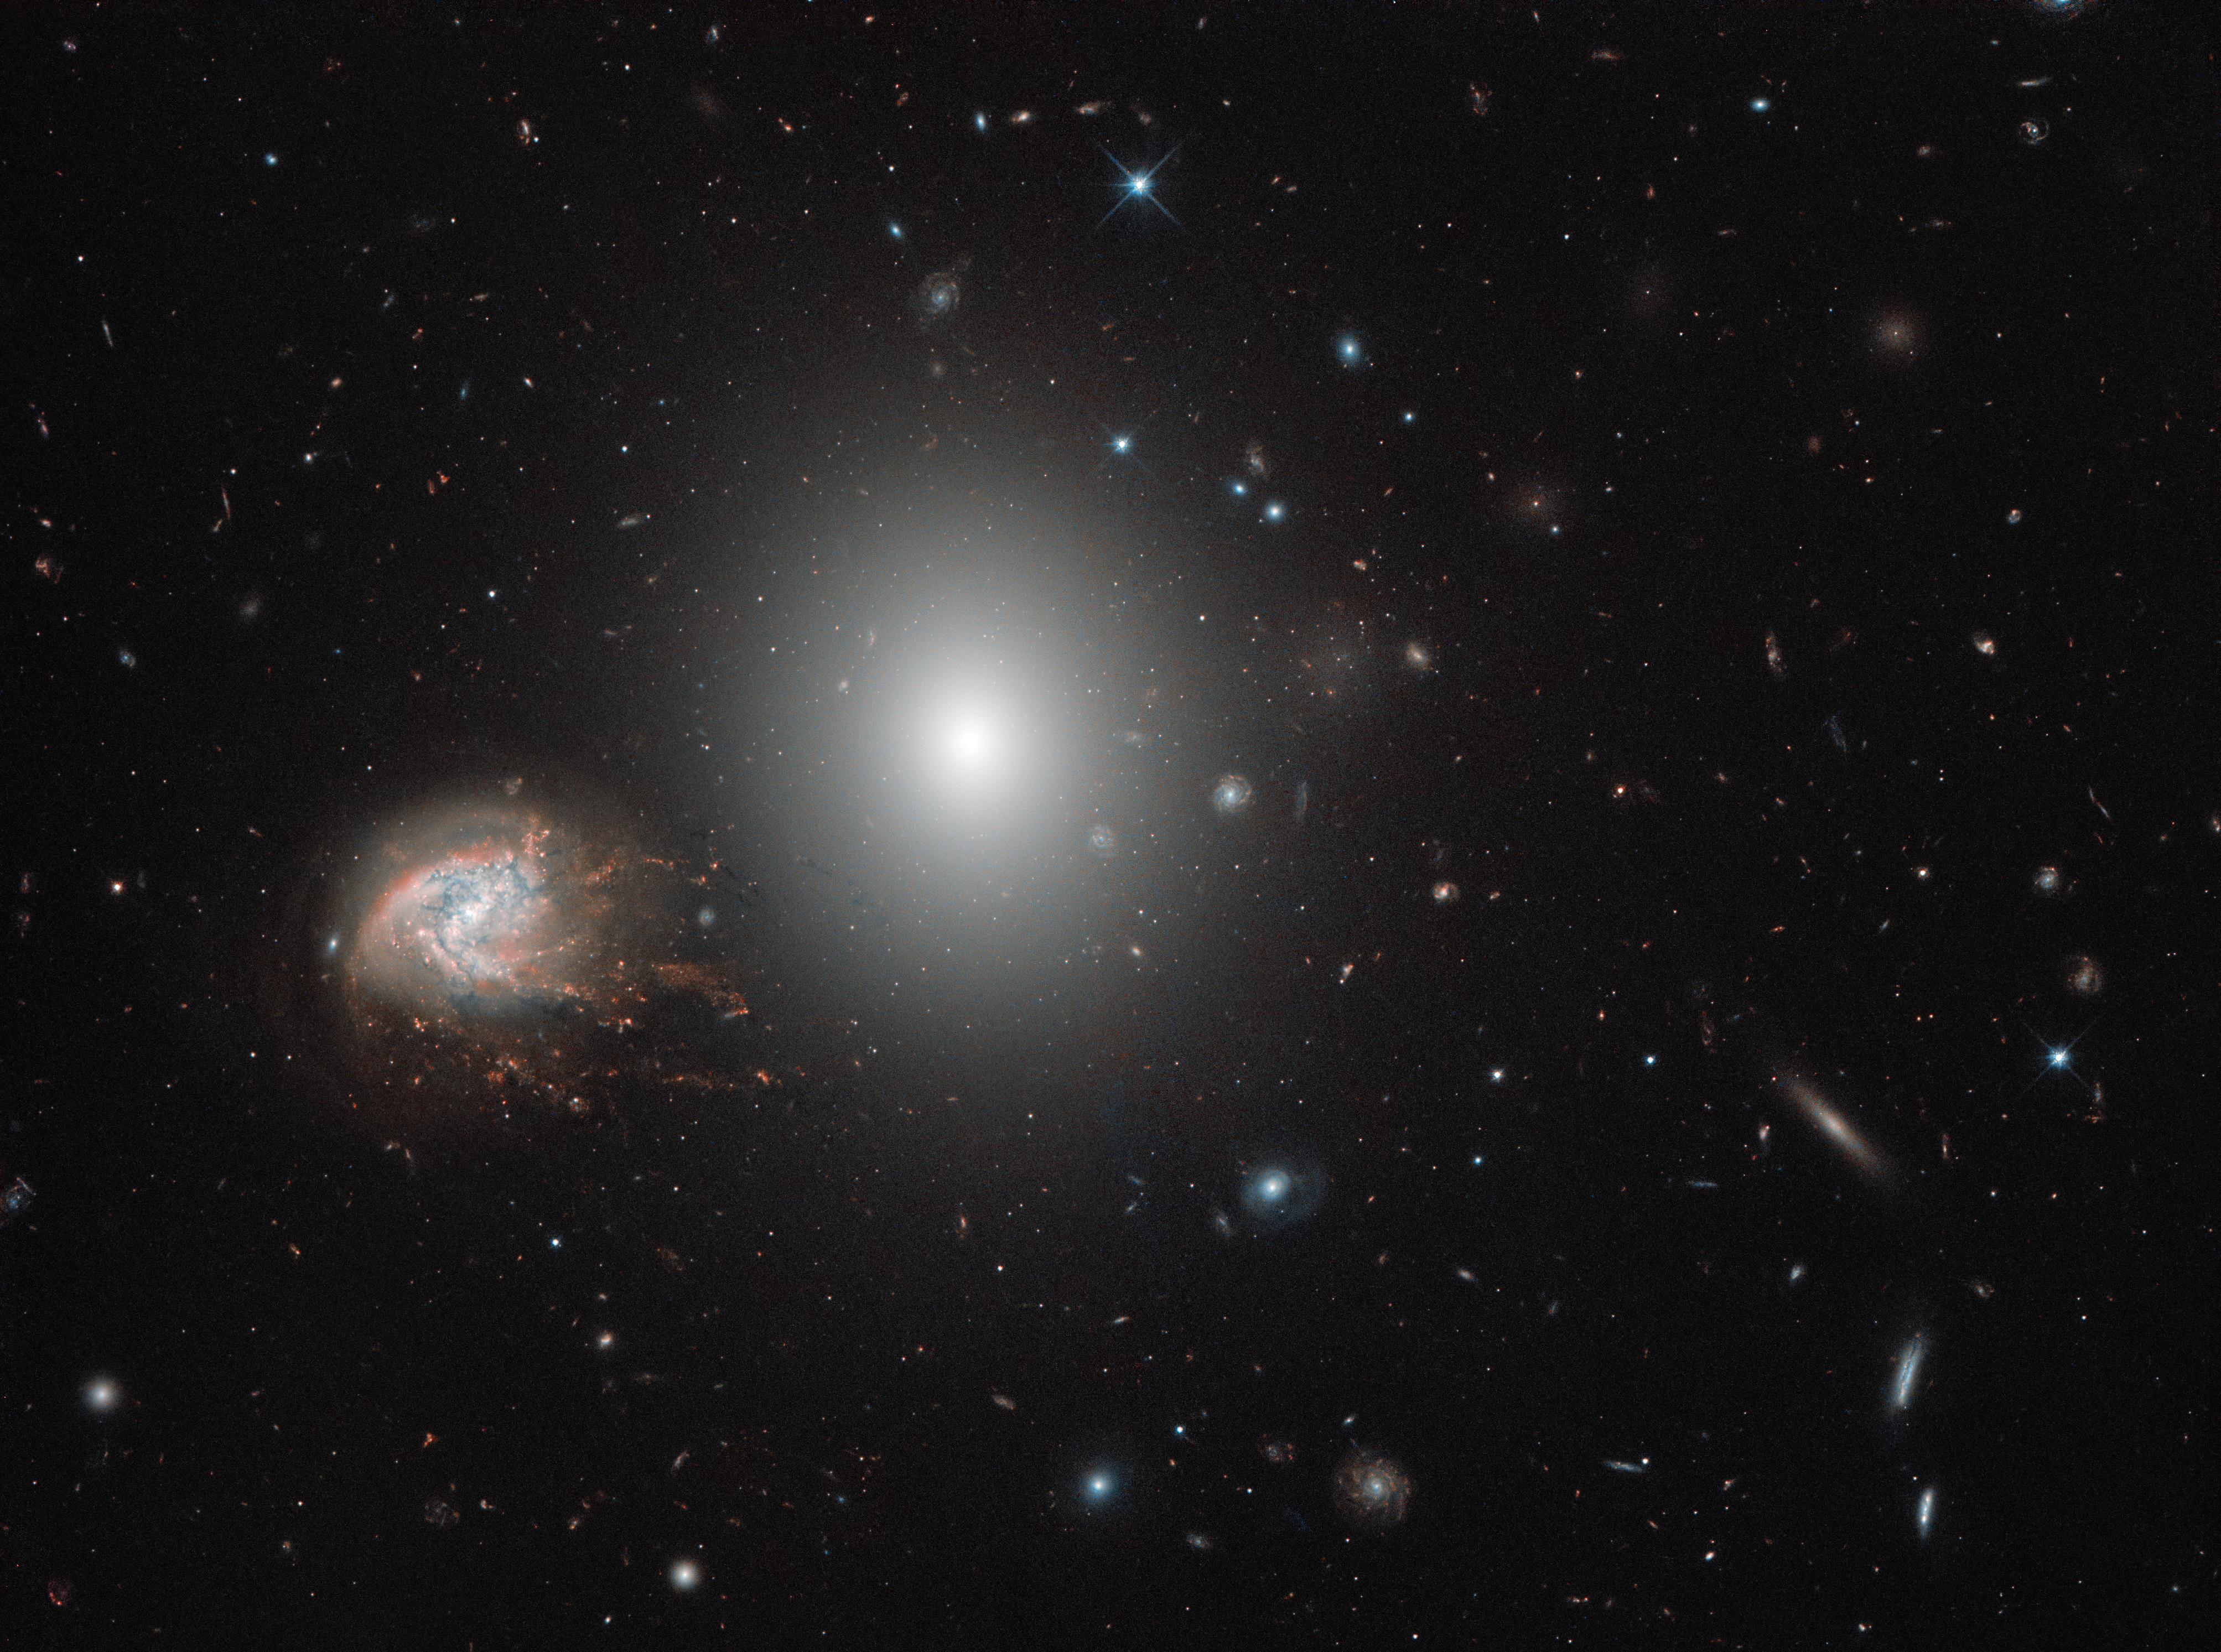

Knots and bursts

In the northern constellation of Coma Berenices (Berenice's Hair) lies the impressive Coma Cluster — a structure of over a thousand galaxies bound together by gravity. Many of these galaxies are elliptical types, as is the brighter of the two galaxies dominating this image: NGC 4860 (centre). However, the outskirts of the cluster also host younger spiral galaxies that proudly display their swirling arms. Again, this image shows a wonderful example of such a galaxy in the shape of the beautiful NGC 4858, which can be seen to the left of its bright neighbour and which stands out on account of its unusual, tangled, fiery appearance.

NGC 4858 is special. Rather than being a simple spiral, it is something called a “galaxy aggregate”, which is, just as the name suggests, a central galaxy surrounded by a handful of luminous knots of material that seem to stem from it, extending and tearing away and adding to or altering its overall structure. It is also experiencing an extremely high rate of star formation, possibly triggered by an earlier interaction with another galaxy. As we see it, NGC 4858 is forming stars so frantically that it will use up all of its gas long before it reaches the end of its life. The colour of its bright knots indicates that they are formed of hydrogen, which glows in various shades of bright red as it is energised by the many young, hot stars lurking within.

This scene was captured by the NASA/ESA Hubble Space Telescope’s Wide Field Camera 3 (WFC3), a powerful camera designed to explore the evolution of stars and galaxies in the early Universe.

Credit: ESA/Hubble & NASA